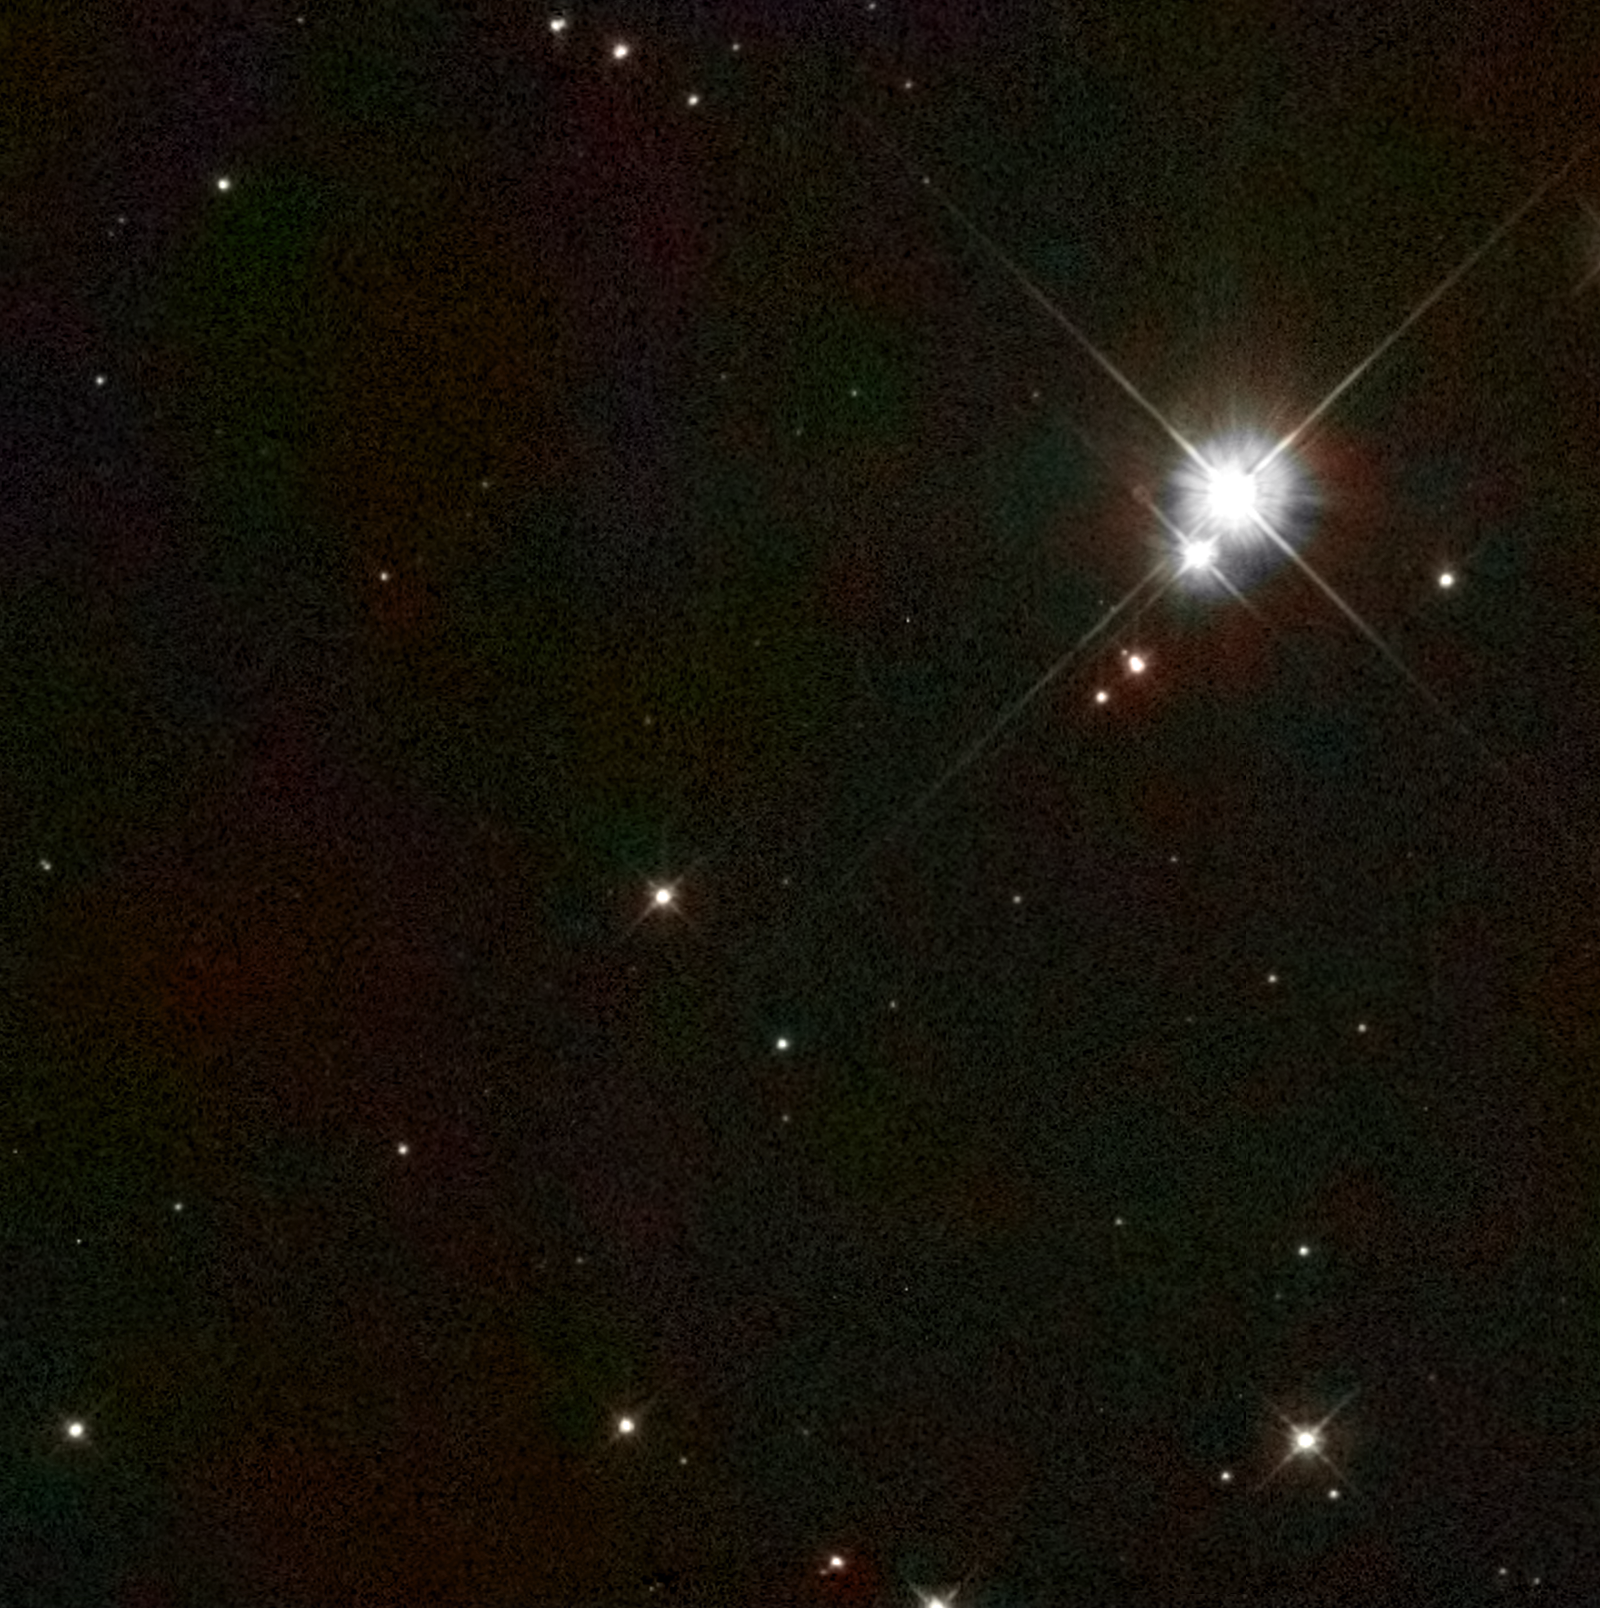

Location of candidate progenitor companion to Tycho's supernova [WFPC2]

A Hubble Space Telescope Wide Field Planetary Camera 2 image of a small section of sky containing a suspected runaway companion star to a titanic supernova explosion witnessed in the year 1572 by the great Danish astronomer Tycho Brahe. The star is like our Sun except several billion years older. It is moving through space at three times the speed of the other stars in its neighbourhood. Hubble's sharp view allowed for a measurement of the star's motion, based on images taken in 1999 and 2003. The image consists of a single greyscale Hubble exposure colorized with the help of data from Digitized Sky Survey 2.

Credit: NASA/ESA and P. Ruiz-Lapuente (University of Barcelona)